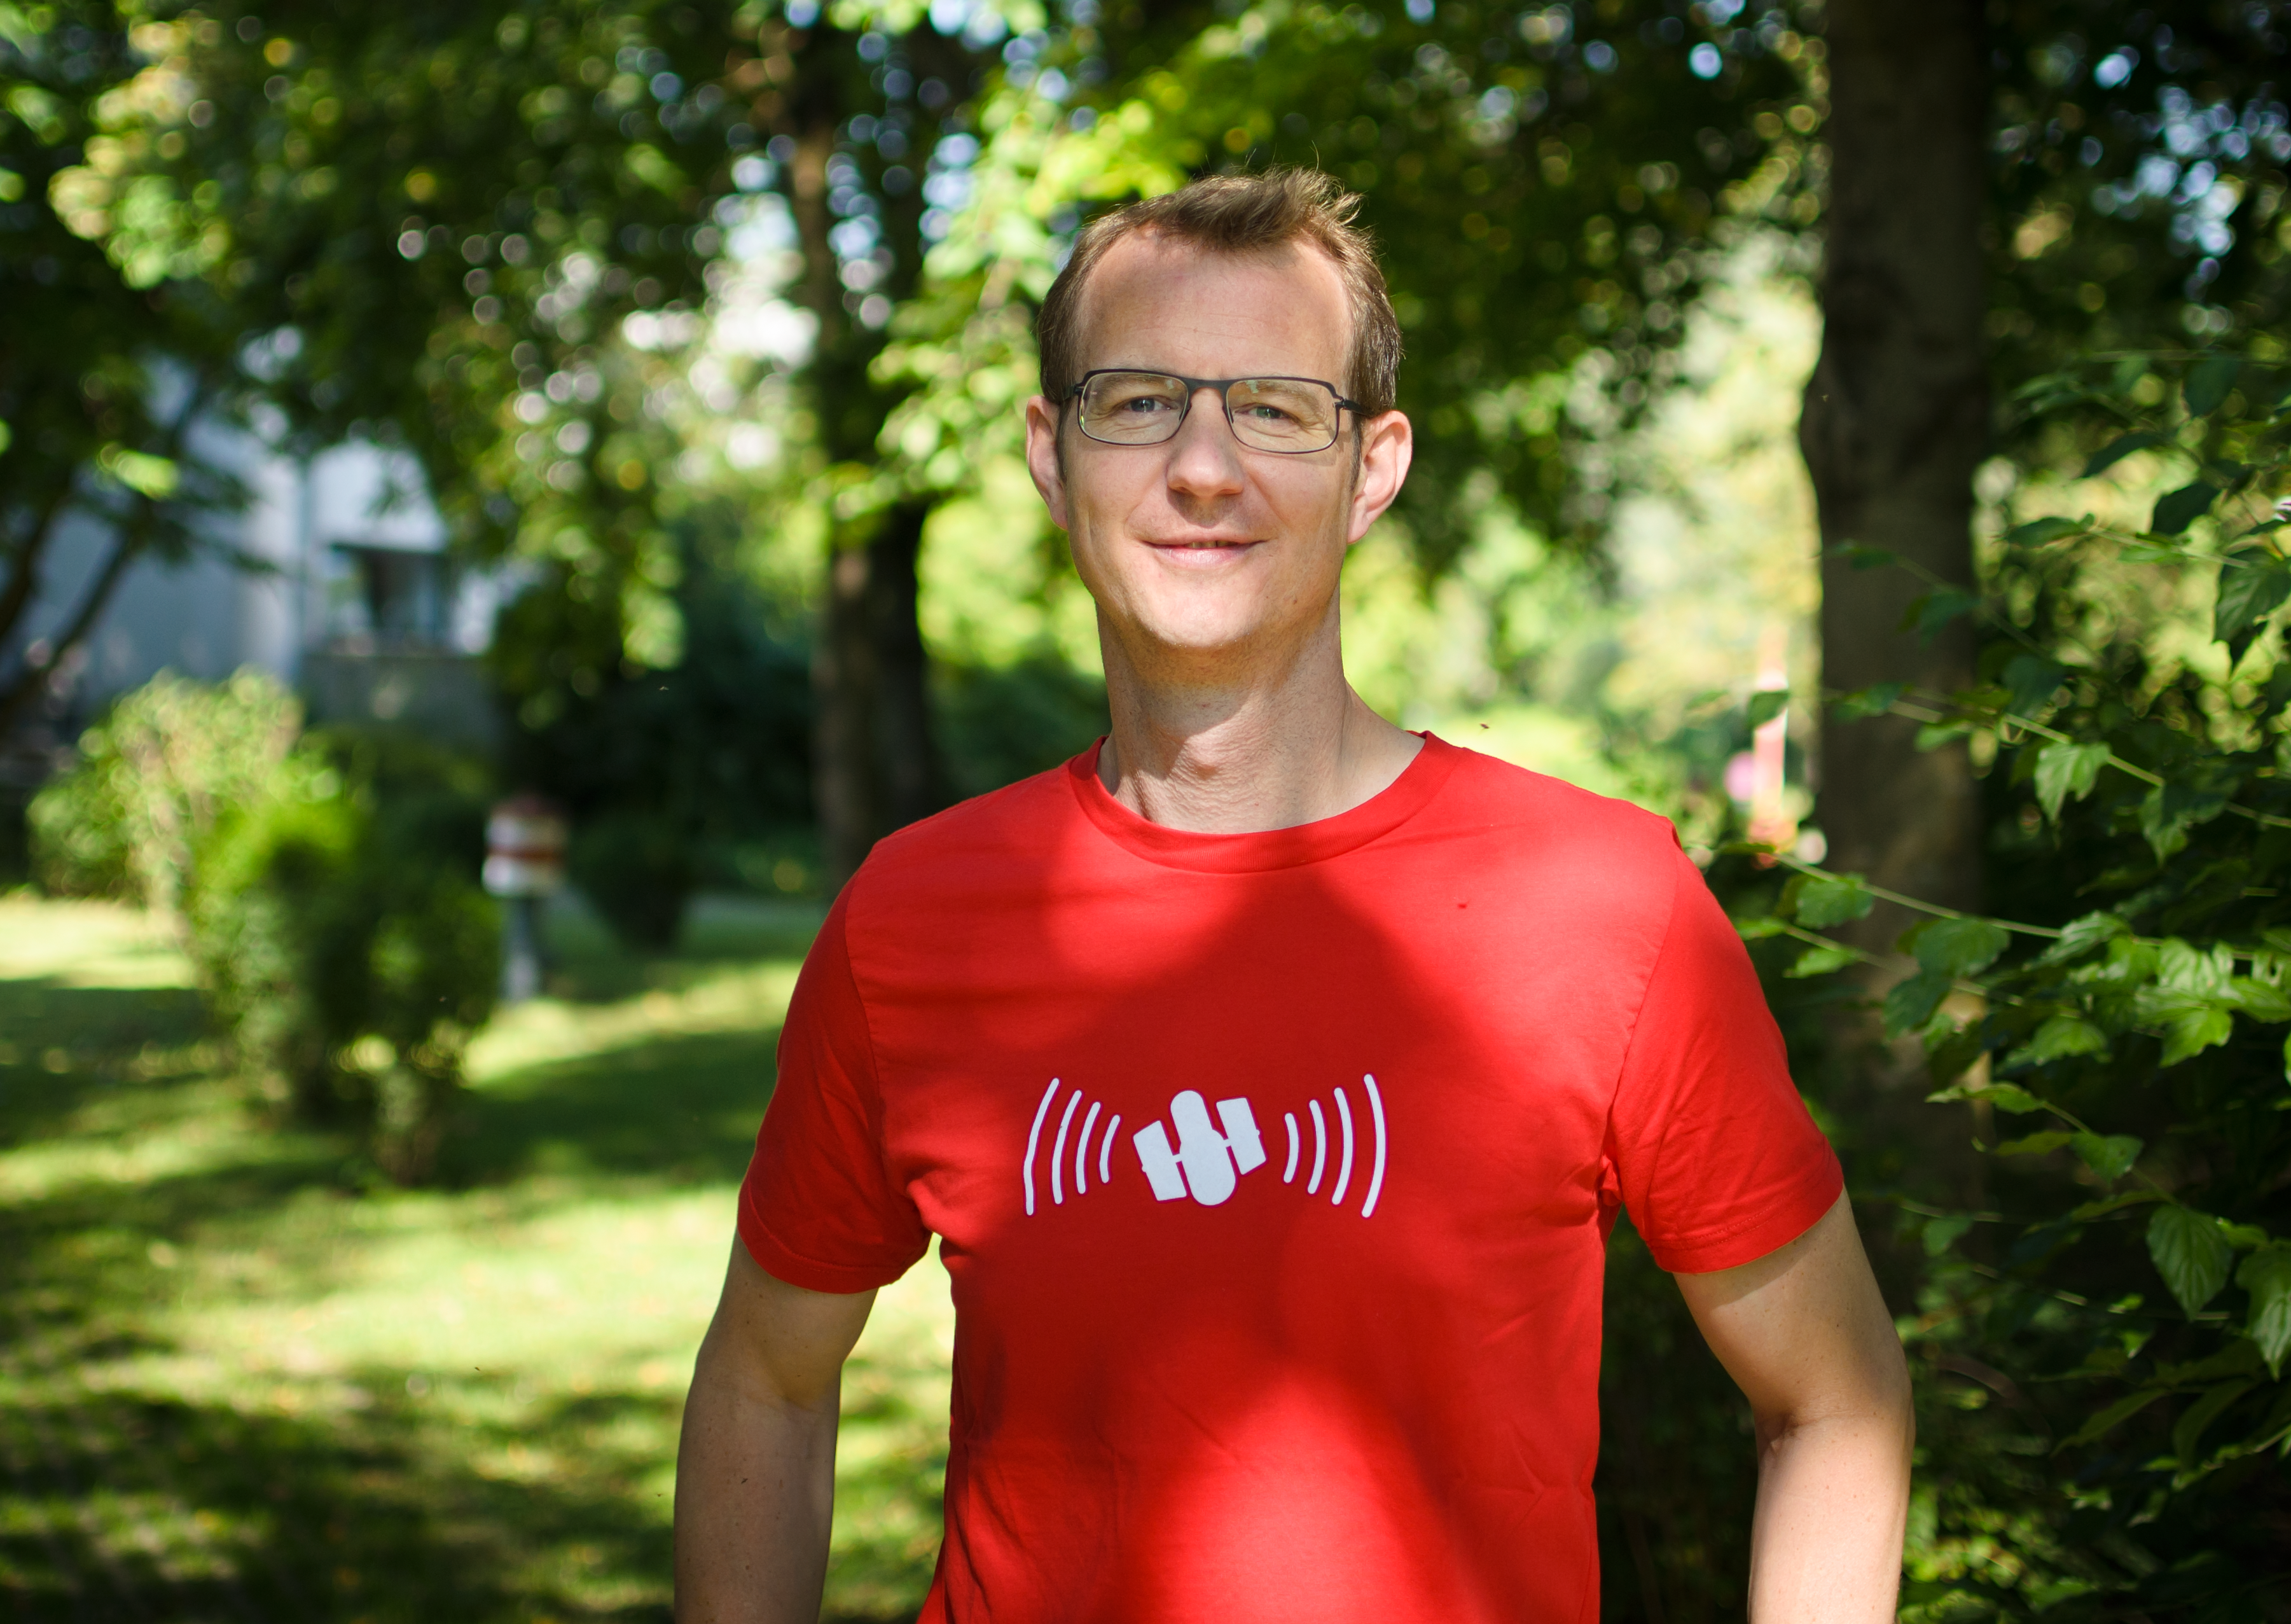

Dr J

Joe Liske, the "Dr. J", Hubblecast presenter.

Credit: NASA & ESA